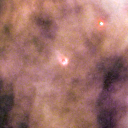

202-228

One of 42 new proplyds discovered in the Orion Nebula, 202-228 is one of the bright proplyds that lies relatively close to the nebula’s brightest star, Theta 1 Orionis C.

Credit: NASA/ESA and L. Ricci (ESO)